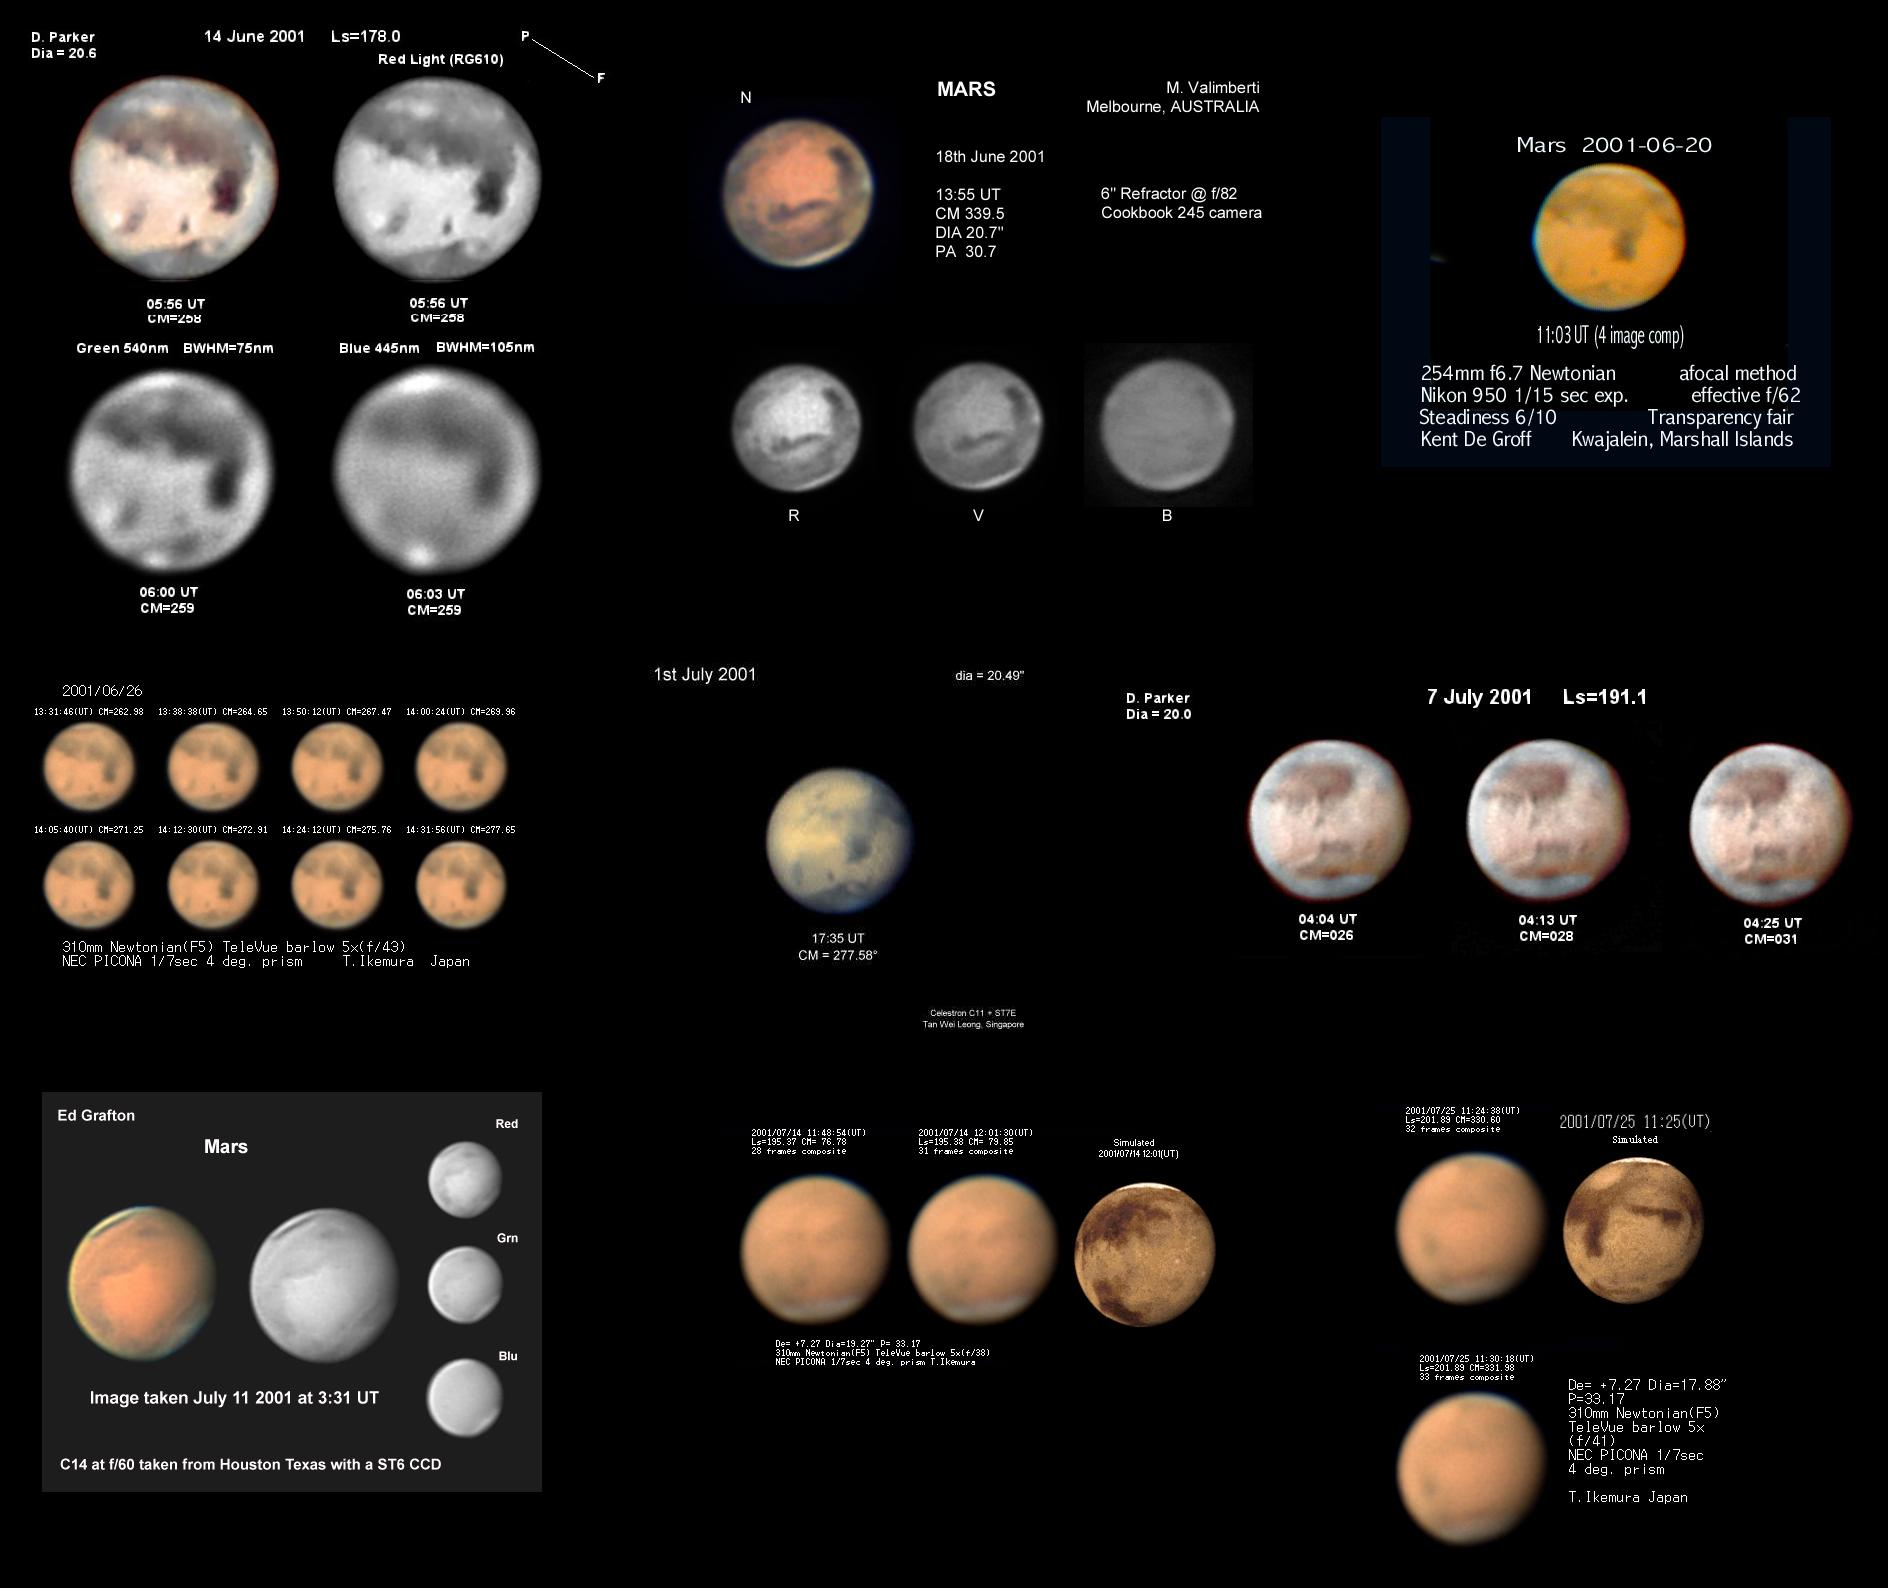

Amateur images from Marswatch

A collection of amateur images of our closest neighbor, with the frozen carbon dioxide poles clearly visible.

Credit: Dave Klassen (Rowan University)